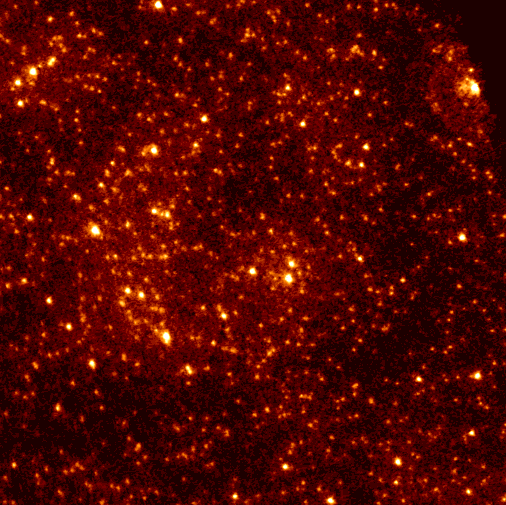

47 Tucanae FOC Pre-COSTAR image

This is an image of a star cluster.

Credit: Dr. R. Jedrzejewski (STScI), NASA, ESA